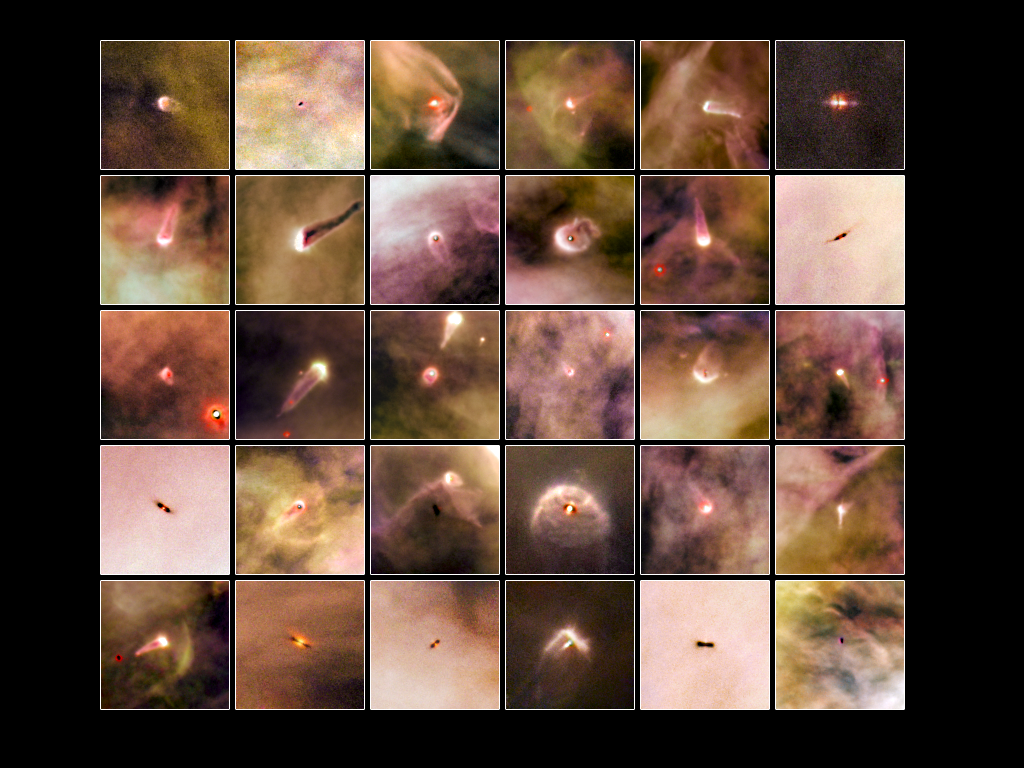

Orion Nebula proplyd atlas

This atlas features 30 proplyds, or protoplanetary discs, that were recently discovered in the majestic Orion Nebula. Using the wide field channel on Hubble’s Advanced Camera for Surveys (ACS), astronomers discovered a total of 42 new discs that could be the seeds of planetary systems to come.

Within the awe-inspiring, gaseous folds of Orion, researchers have identified two different types of discs around young and forming stars: those that lie close to the brightest star in the cluster (Theta 1 Orionis C) and those farther away from it. The bright star heats up the gas in the nearby discs, causing them to shine brightly. The discs that are farther away do not receive enough of the energetic radiation from the star to set the gas ablaze; thus, they can only be detected as dark silhouettes against the background of the bright nebula, as the dust that surrounds these discs absorbs background visible light. By studying these silhouetted discs, astronomers are better able to characterize the properties of the dust grains that are thought to bind together and possibly form planets like our own.

In the brighter discs the excited material produces many glowing cusps, which all face the bright star, but from our point of view are randomly oriented through the nebula, so we see some edge on, and others face on, for instance. Other interesting features enhance the look of these captivating objects, such as emerging jets of matter and shock waves. The dramatic shock waves are formed when the stellar wind from the nearby massive star collides with the gas in the nebula, sculpting boomerang shapes or arrows or even, in the case of 181-825, a space jellyfish!

It is relatively rare to see visible images of proplyds, but the high resolution and sensitivity of Hubble and the Orion Nebula’s proximity to Earth allow for precise views of these potential planetary systems.

This proplyd atlas is the first scientific outcome from the HST Treasury Program on the Orion Nebula.

Credit: NASA/ESA and L. Ricci (ESO)